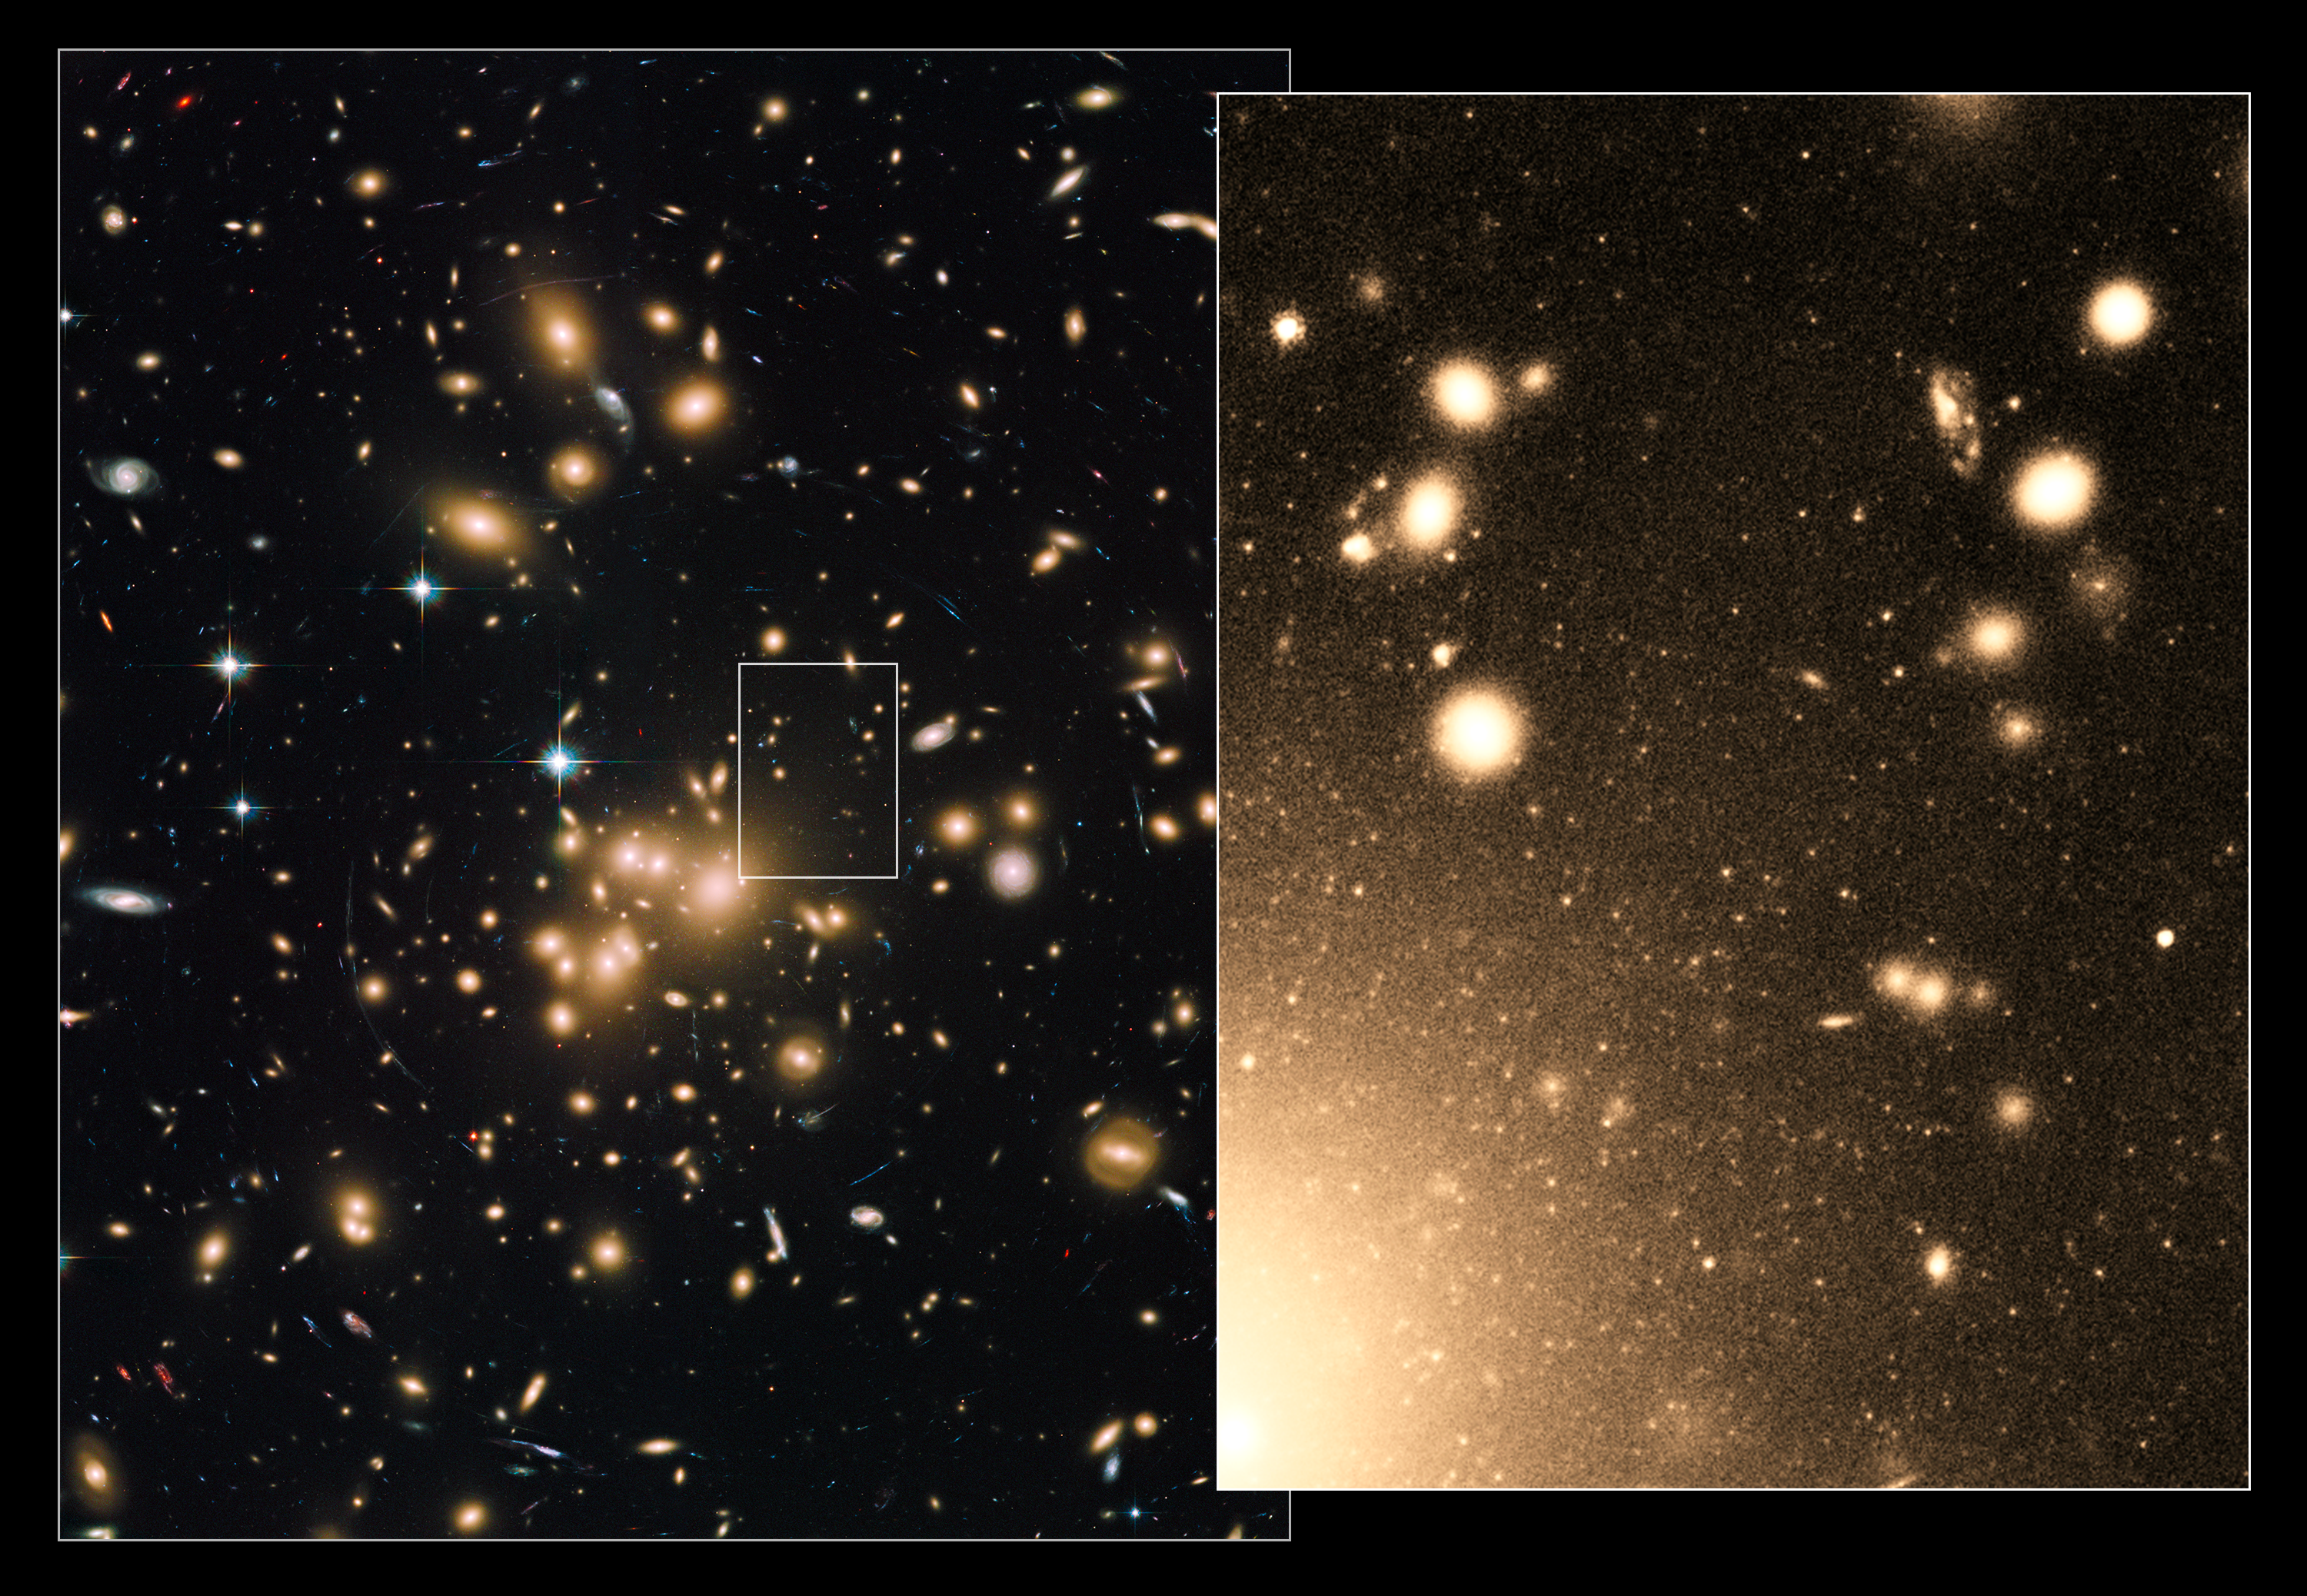

Globular clusters within Abell 1689

This new image of galaxy cluster Abell 1689 shows the region of sky in stunning detail, capturing the glowing golden clumps, bright stars, ethereal spiral galaxies, and electric blue arcs peppered throughout the frame.

Abell 1689 is one of the biggest and most massive galaxy clusters known – so massive that it warps the space around it, bending and enhancing the light from galaxies lying far beyond it like a cosmic magnifying glass.

But there is more going on here than initially meets the eye. Peering deep into the heart of the massive galaxy cluster Abell 1689, the NASA/ESA Hubble Space Telescope recently spied some 10 000 globular clusters. From this, the astronomers estimate that this galaxy cluster could possibly contain over 160 000 globulars overall, the largest population ever found in such a cluster. By comparison, our galaxy, the Milky Way, hosts about 150 such clusters.

By studying the globular clusters within this massive and distant galaxy cluster, the astronomers also found that these globulars are reliable tracers of the amount of dark matter contained within galaxy clusters like Abell 1689. Globular clusters are dense collections of hundreds of thousands of stars – some of the oldest surviving stars in the Universe.

The image on the left, taken by Hubble’s Advanced Camera for Surveys (ACS), shows the numerous galaxies that make up Abell 1689. The box near the centre outlines one of the regions sampled by Hubble, containing a rich collection of globular clusters.

The view on the right zooms into the region of this cluster that has been found to be packed with globular clusters. They appear as thousands of tiny white dots, like a blizzard of snowflakes. The larger white blobs are entire galaxies full of stars.

Credit: NASA, ESA, J. Blakeslee (NRC Herzberg Astrophysics Program, Dominion Astrophysical Observatory), and K. Alamo-Martinez (National Autonomous University of Mexico) Acknowledgment: H. Ford (JHU)